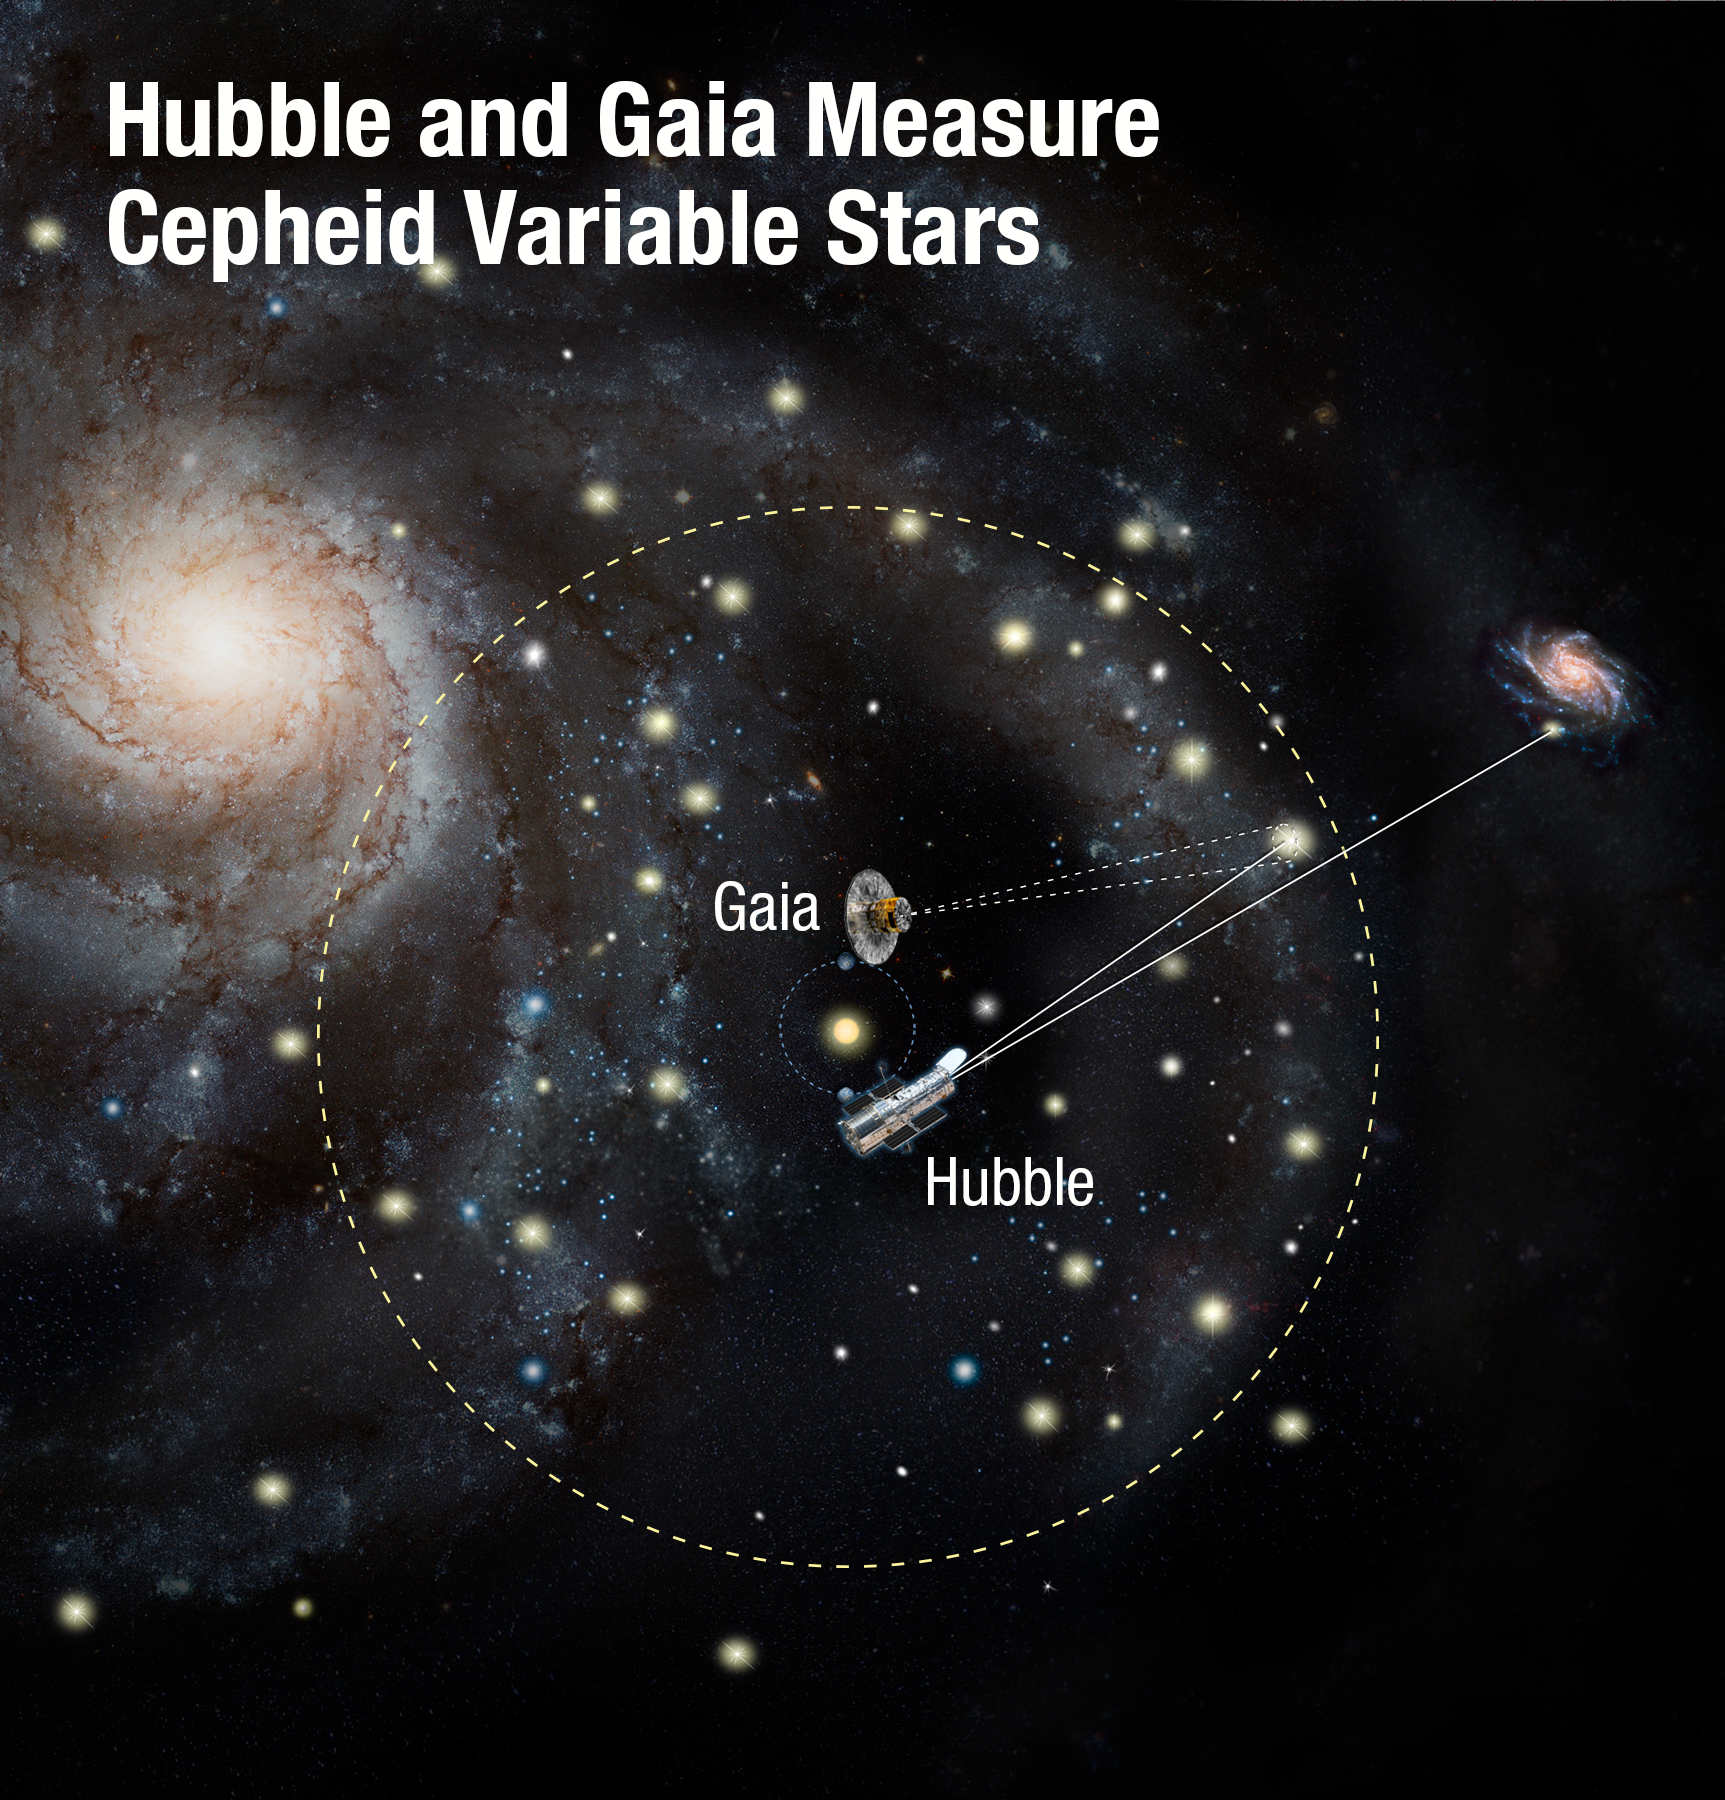

Hubble and Gaia measure Cepheid variable stars

Using two of the world’s most powerful space telescopes — the NASA/ESA Hubble Space Telescope and ESA’s Gaia — astronomers have made the most precise measurements to date of the Universe’s expansion rate. This is calculated by gauging the distances between nearby galaxies using special types of stars called Cepheid variables as cosmic yardsticks. By comparing their intrinsic brightness — measured with Hubble — with their apparent brightness as seen from Earth, scientists can calculate their distances. Gaia further refines this yardstick by measuring the distances to Cepheid variables within our Milky Way Galaxy using astrometry. This allowed astronomers to more precisely calibrate the distances to Cepheids that are seen in other galaxies.

Credit: NASA, ESA, and A. Feild (STScI)